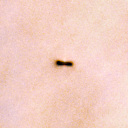

294-606

One of 42 new proplyds discovered in the Orion Nebula, 294-606 is one of the dark proplyds that lies relatively far from the nebula’s brightest star, Theta 1 Orionis C.

Credit: NASA/ESA and L. Ricci (ESO)